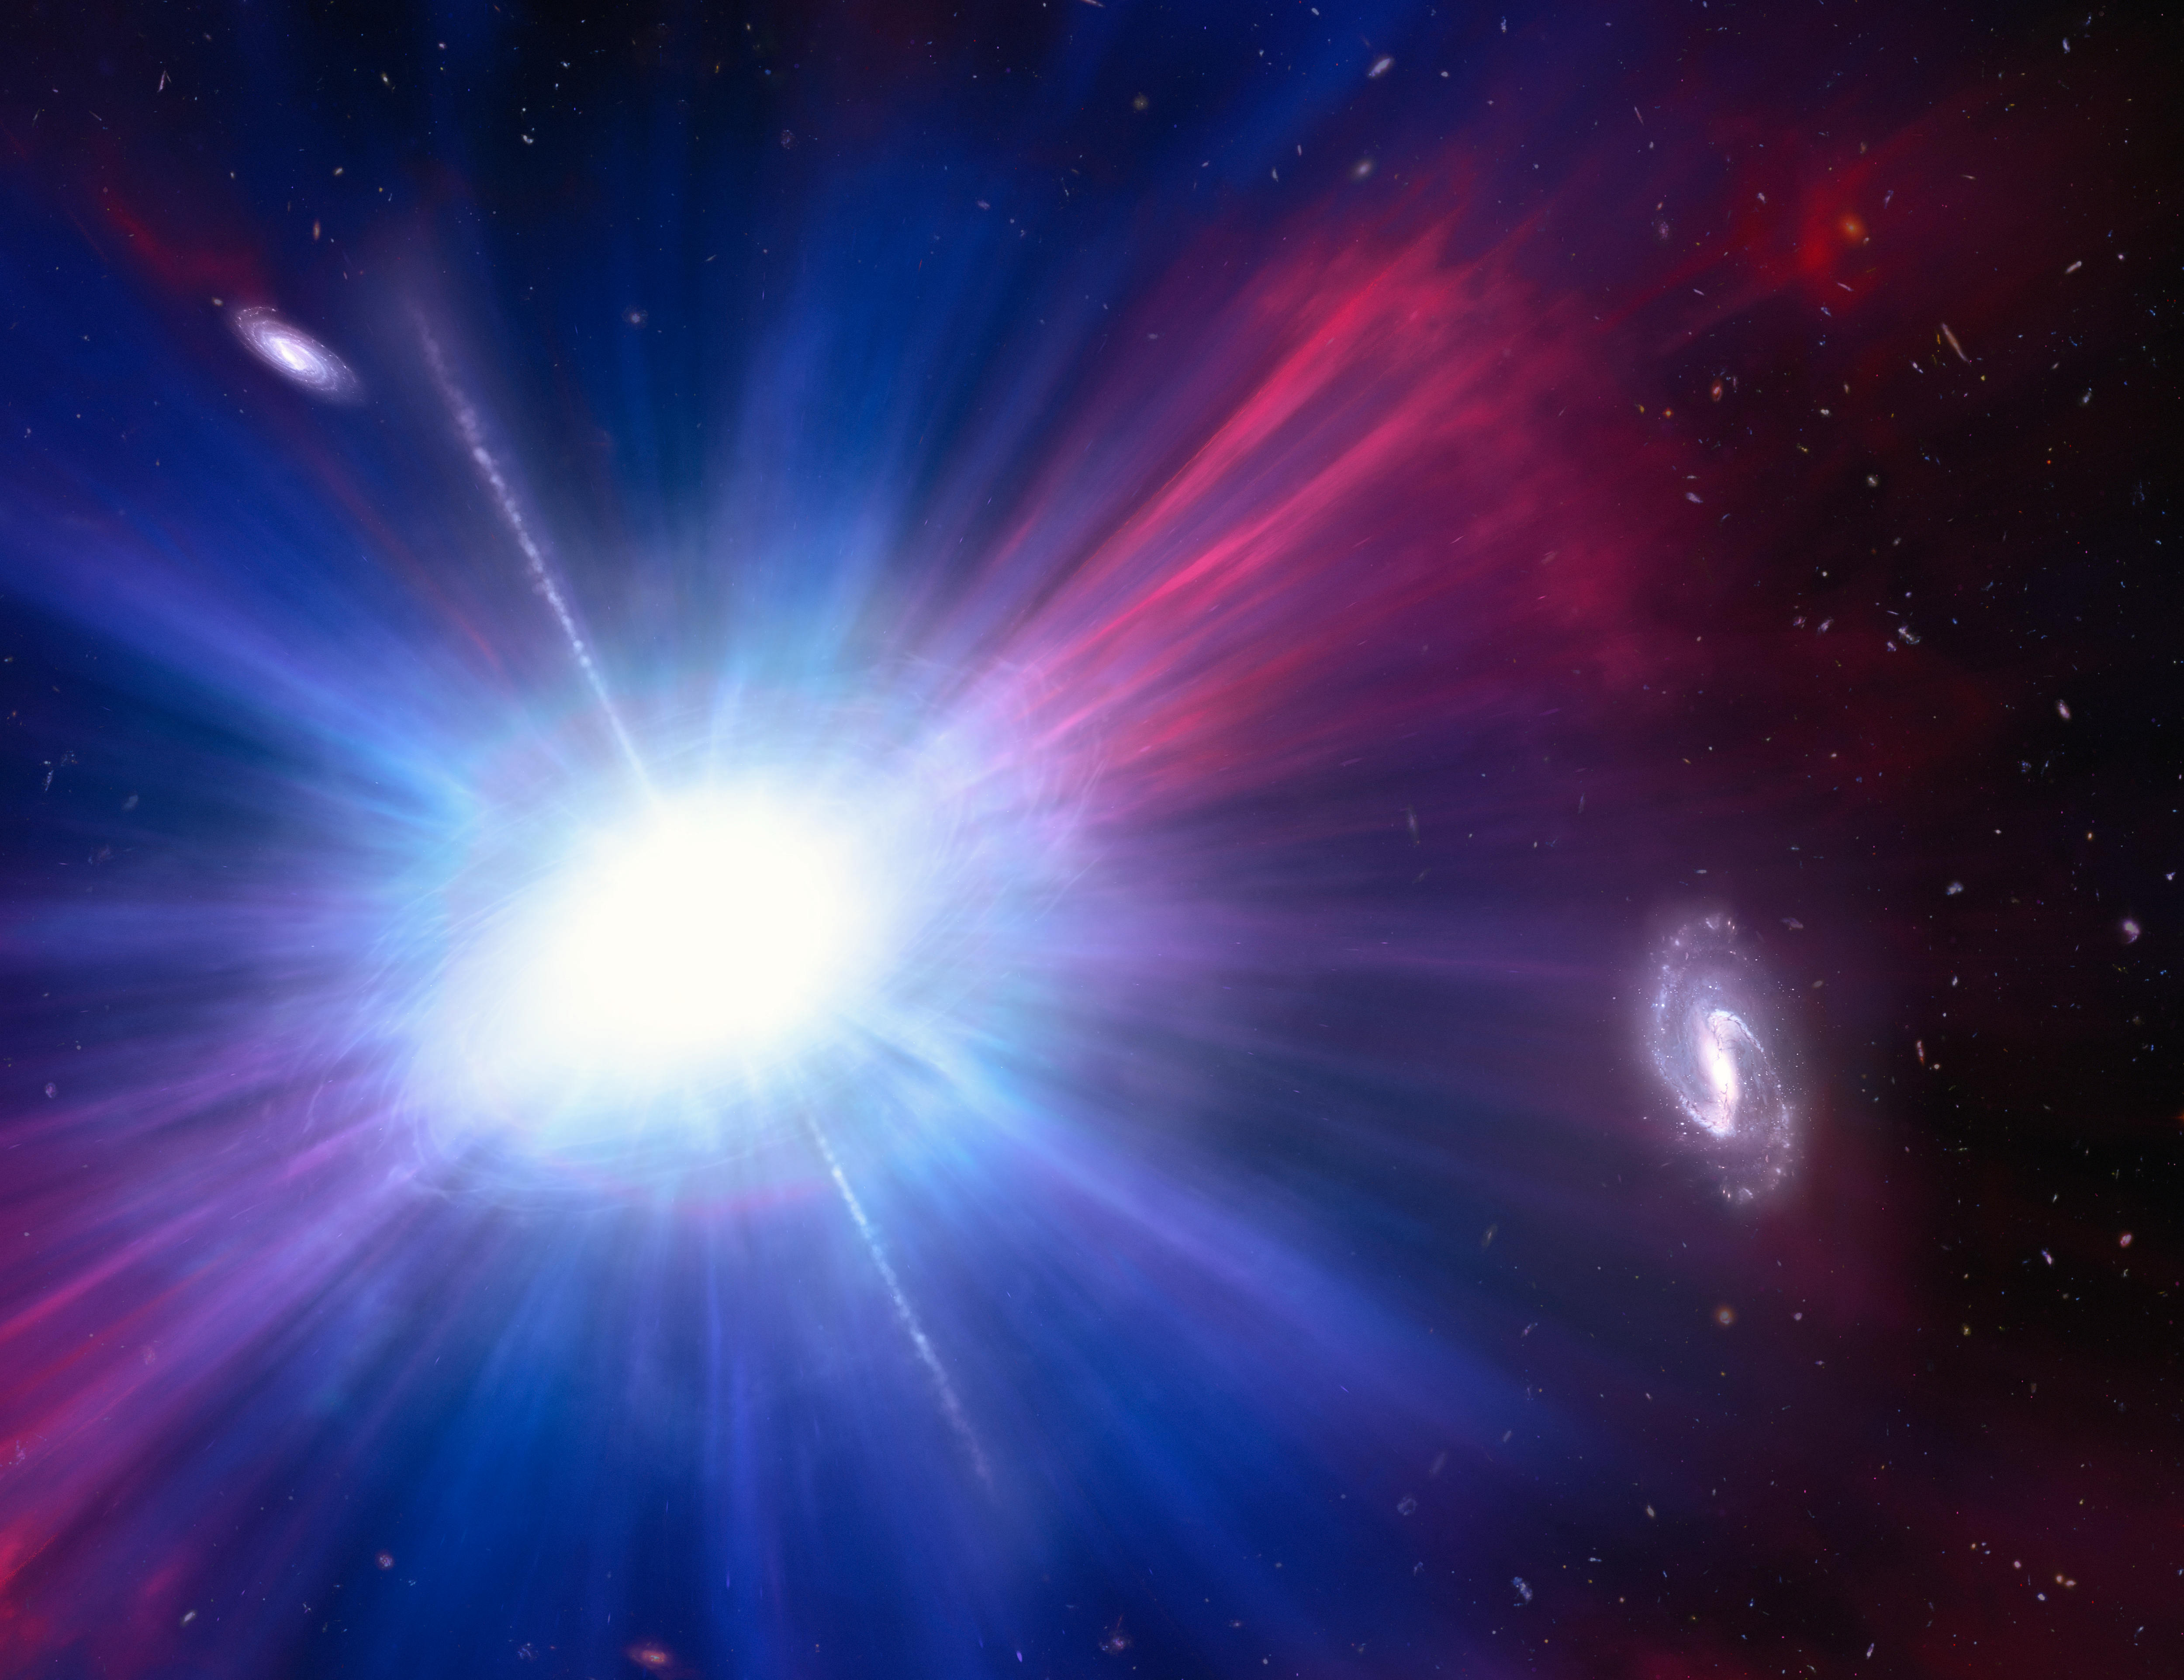

Artist’s Concept of Luminous Fast Blue Optical Transient

This is an artist’s concept of one of the brightest explosions ever seen in space. Called a Luminous Fast Blue Optical Transient (LFBOT), it shines intensely in blue light and evolves rapidly, reaching peak brightness and fading again in a matter of days, unlike supernovae which take weeks or months to dim. Only a handful of previous LFBOTs have been discovered since 2018. And they all happen inside galaxies where stars are being born. But as this illustration shows, the LFBOT flash discovered in 2023 by Hubble was seen between galaxies. This only compounds the mystery of what these transient events are. Because astronomers don’t know the underlying process behind LFBOTs, the explosion shown here is purely conjecture based on some known transient phenomenon.

Credit: NASA, ESA, NSF's NOIRLab, M. Garlick , M. Zamani